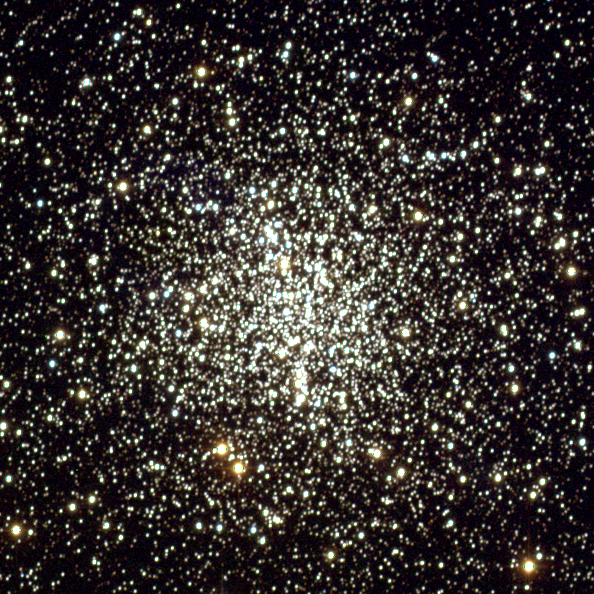

Globular Cluster M4 - NOAO Ground-Based Image

Three unlikely companions - two burned-out stars and a planet - orbit each other near the crowded core of ancient globular cluster M4, of more than 100,000 stars. Radio astronomers discovered the white dwarf and the other burned-out star - a rapidly spinning neutron star, called a pulsar - a decade ago. The third companion's identity was a mystery. Was it a planet or a brown dwarf? The object was too small and too dim to image.

Hubble observations of the dim white dwarf helped astronomers to precisely measure the mass of the mystery object (2.5 times larger than the mass of Jupiter), confirming that it is a planet. In fact, it is the farthest and oldest known planet.

Credit: NOAO/AURA/NSF